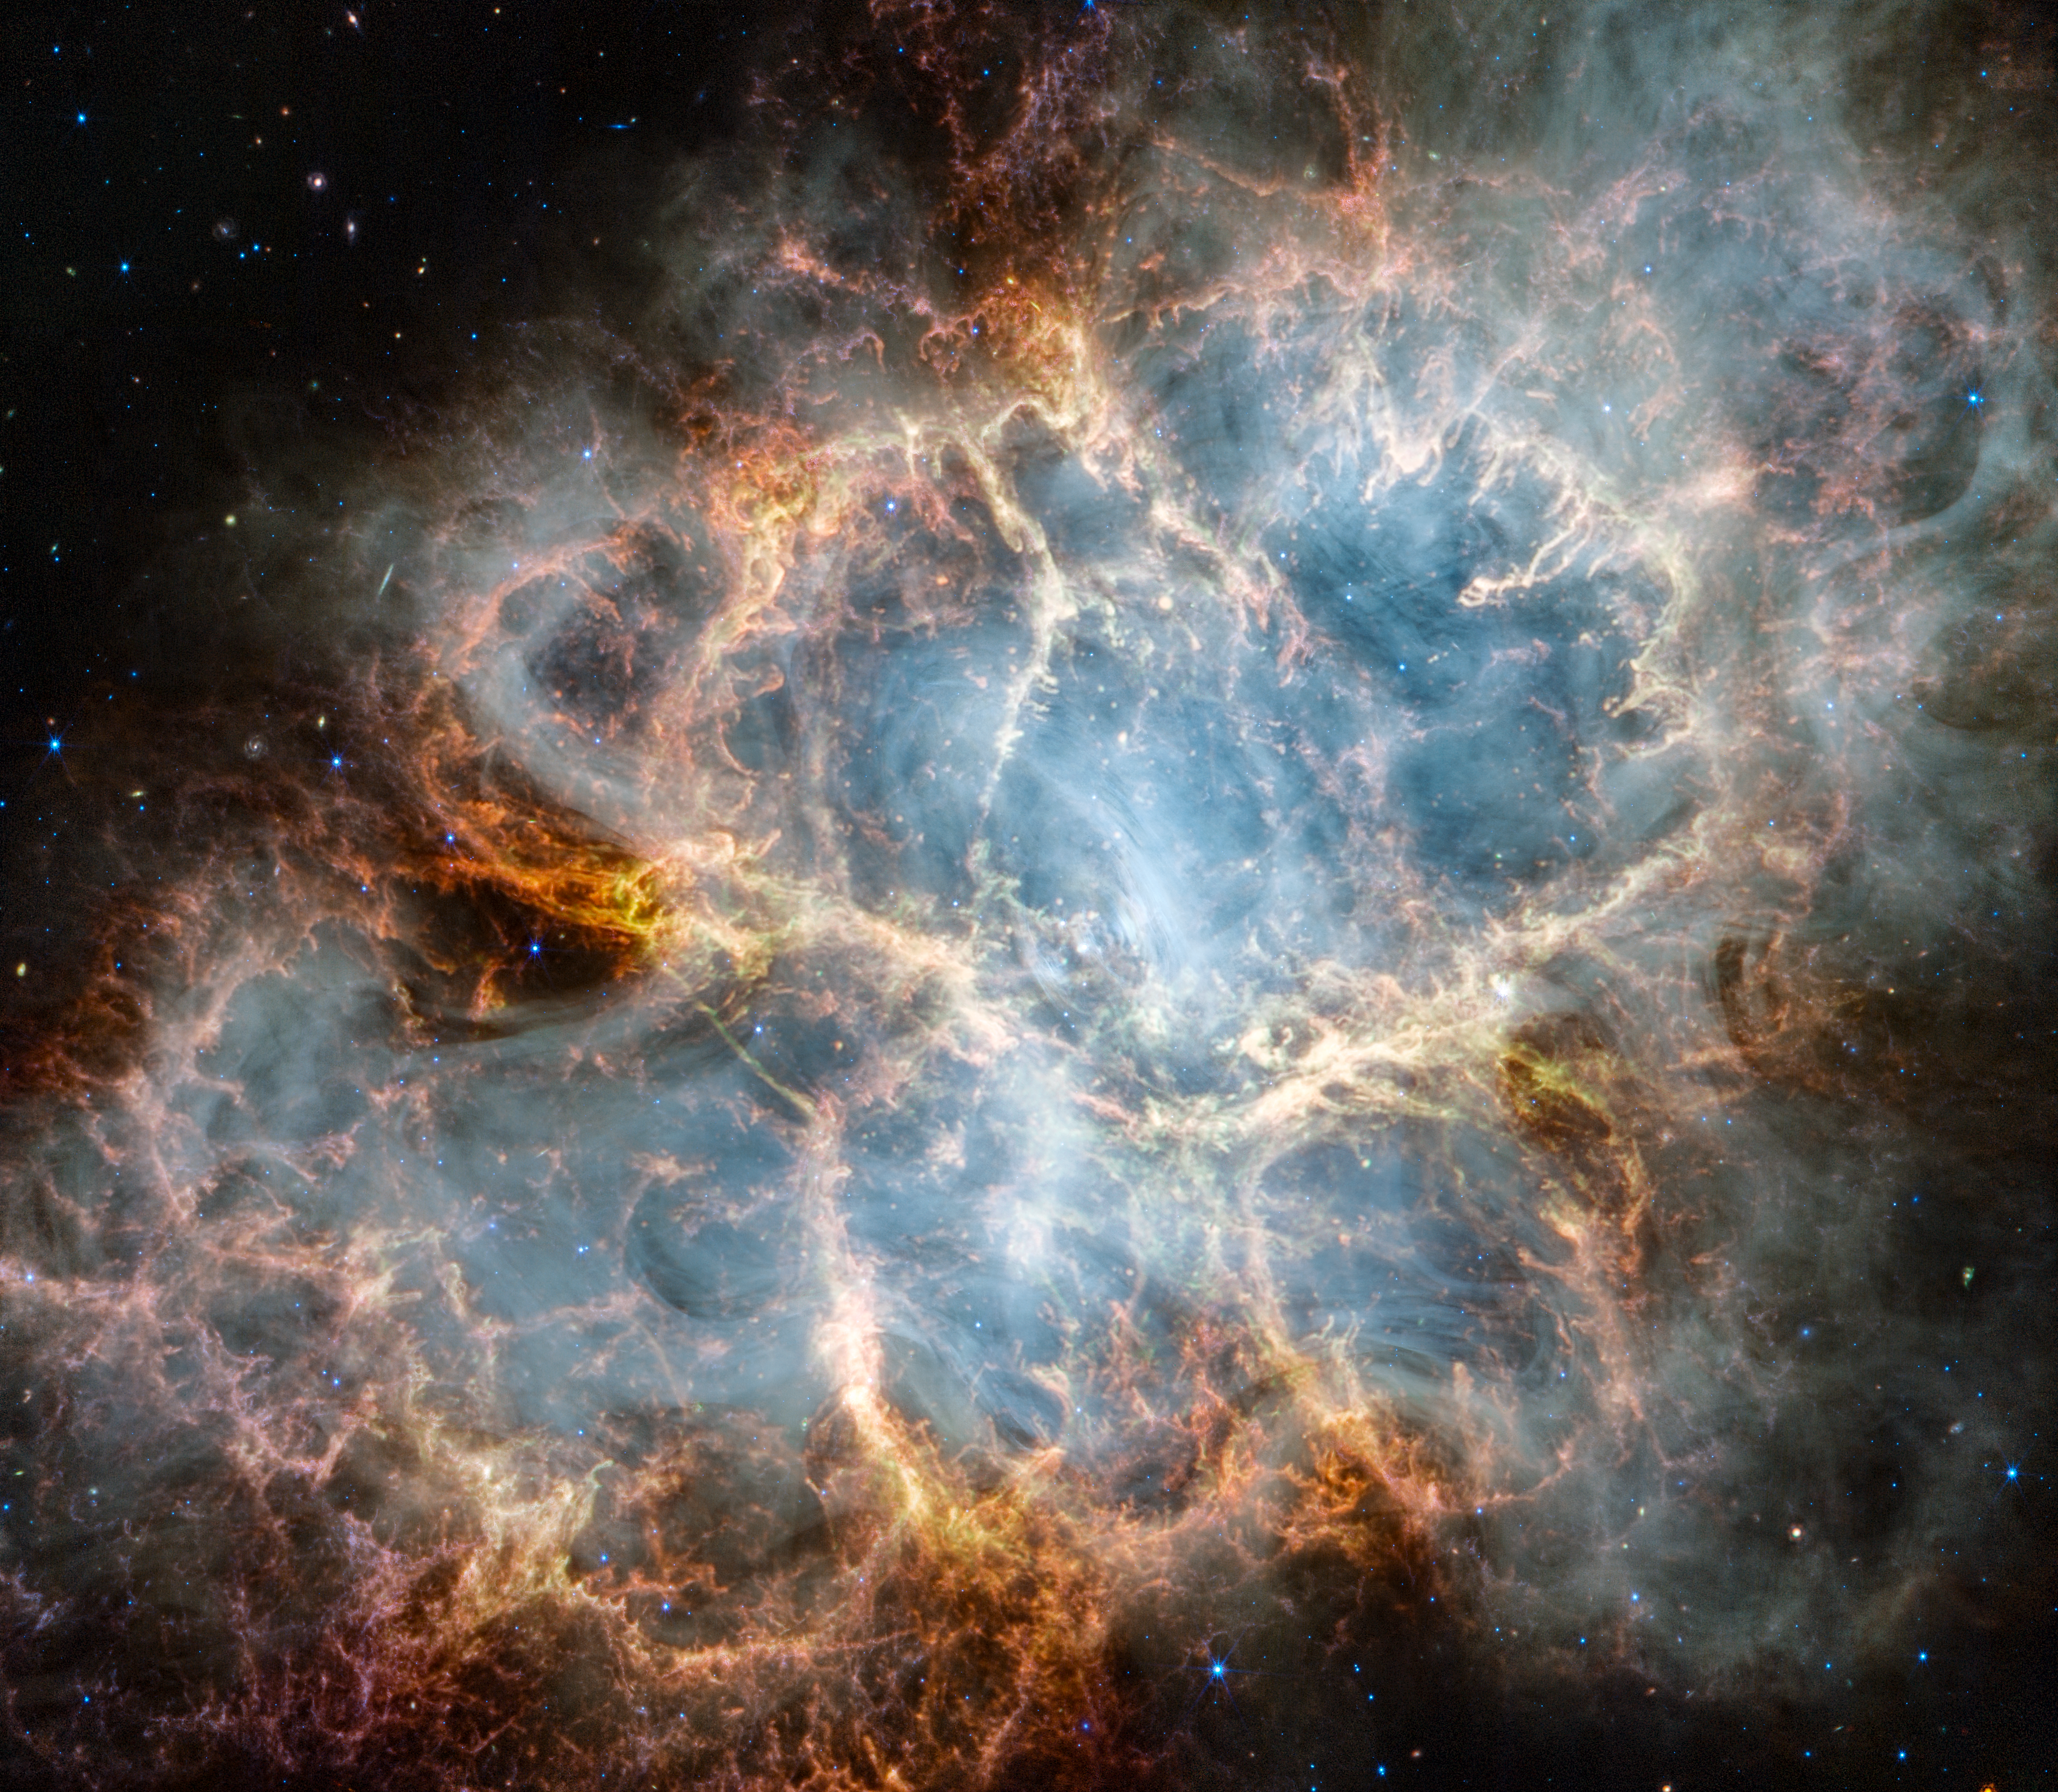

Webb’s new view of the Crab Nebula

The NASA/ESA/CSA James Webb Space Telescope has gazed at the Crab Nebula in the search for answers about the supernova remnant’s origins. Webb’s NIRCam (Near-Infrared Camera) and MIRI (Mid-Infrared Instrument) have revealed new details in infrared light.

Similar to the Hubble optical wavelength image released in 2005, with Webb the remnant appears to consist of a crisp, cage-like structure of fluffy red-orange filaments of gas that trace doubly ionised sulphur (sulphur III). Within the remnant’s interior, yellow-white and green fluffy ridges form large-scale loop-like structures, which represent areas where dust particles reside.

The area within is composed of translucent, milky material. This material is emitting synchrotron radiation, which is emitted across the electromagnetic spectrum but becomes particularly vibrant thanks to Webb’s sensitivity and spatial resolution. It is generated by particles accelerated to extremely high speeds as they wind around magnetic field lines. The synchrotron radiation can be traced throughout the majority of the Crab Nebula’s interior.

Locate the wisps that follow a ripple-like pattern in the middle. In the centre of this ring-like structure is a bright white dot: a rapidly rotating neutron star. Further out from the core, follow the thin white ribbons of the radiation. The curvy wisps are closely grouped together, following different directions that mimic the structure of the pulsar’s magnetic field. Note how certain gas filaments are bluer in colour. These areas contain singly ionised iron (iron II).

Credit: NASA, ESA, CSA, STScI, T. Temim (Princeton University)